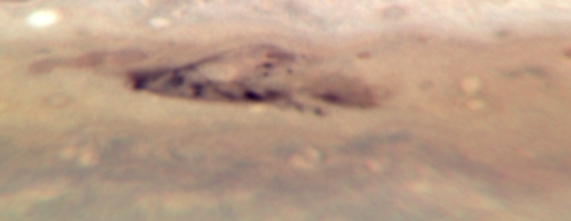

Jupiter: 3 August 2009

Image taken with Hubble's Wide Field Camera 3 on 3 August 2009.

Credit: NASA, ESA, M. Wong (University of California, Berkeley), H.B. Hammel (Space Science Institute, Boulder, Colo.), I. de Pater (University of California, Berkeley), and the Jupiter Impact Team